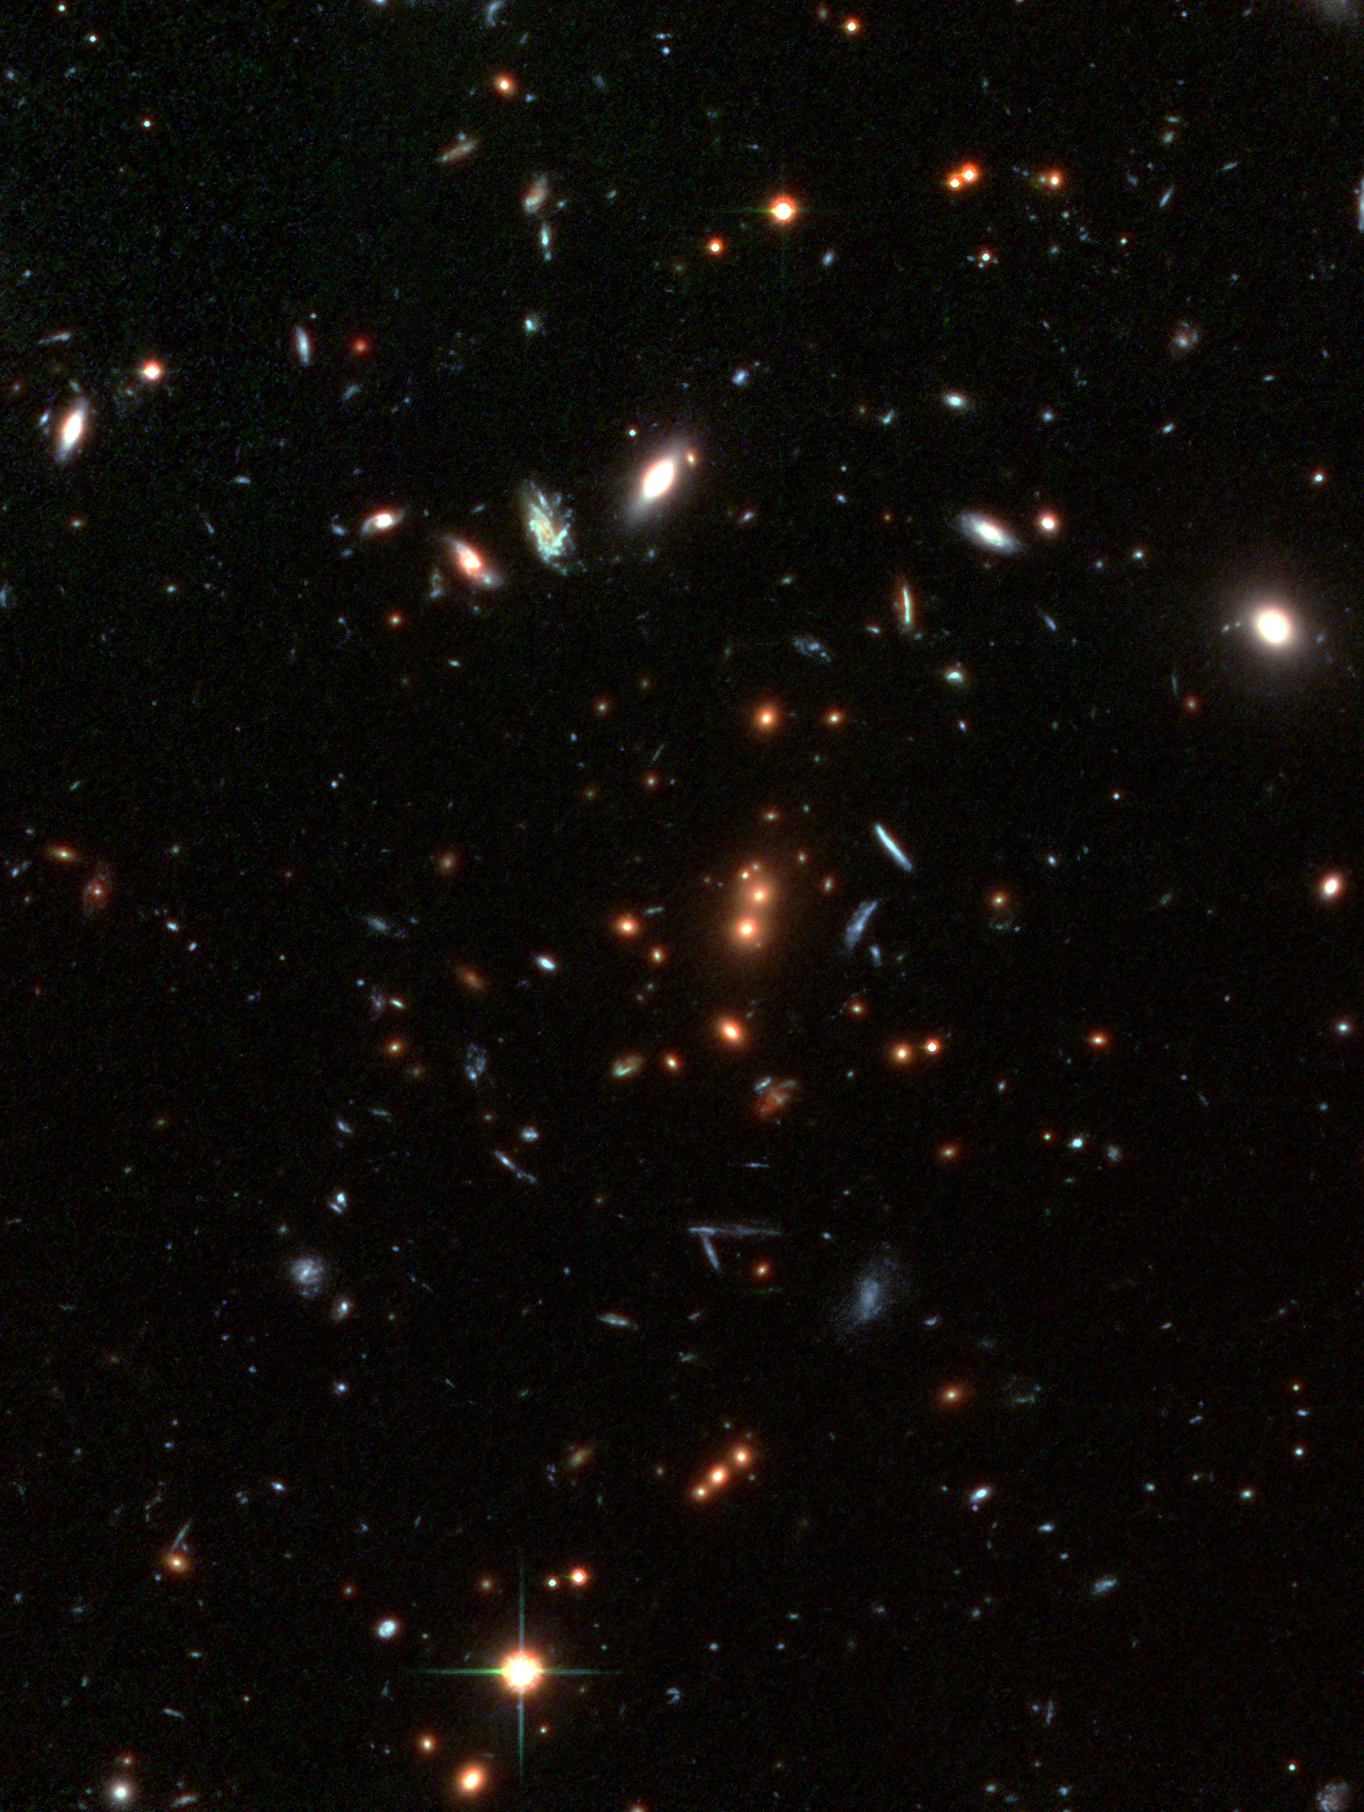

The cluster RDCS1252.9-2927 (detail)

Looking back in time to when the universe was in its formative youth, the Advanced Camera for Surveys (ACS) aboard the NASA/ESA Hubble Space Telescope captured this revealing image of the galaxy cluster RDCS1252.9-2927.

This image is made with an additional infrared exposure taken with the European Southern Observatory's Very Large Telescope, shows mature galaxies in a massive cluster that existed when the cosmos was 5 billion years old. The cluster, called RDCS1252.9-2927, is as massive as 200 trillion suns and is the most massive known cluster for its epoch. The image reveals the core of the cluster and is part of a much larger mosaic of the entire cluster. Dominating the core are a pair of large, reddish elliptical galaxies [near centre of image]. Their red colour indicates an older population of stars. Most of the stars are at least 1 billion years old. The two galaxies appear to be interacting and may eventually merge to form a larger galaxy that is comparable to the brightest galaxies seen in present-day clusters.

The red galaxies surrounding the central pair are also cluster members. The cluster probably contains many thousands of galaxies, but only about 50 can be seen in this image. The full mosaic reveals several hundred cluster members. Many of the other galaxies in the image, including several of the blue galaxies, are foreground or background galaxies. The colour-composite image was assembled from two observations (through i and z filters) taken between May and June 2002 by the ACS Wide Field Camera, and one image with the ISAAC instrument on the VLT taken in 2002 (combined from a J filter exposure and a K filter exposure).

Credit: NASA, ESA, J. Blakeslee (Johns Hopkins University), M. Postman ( Space Telescope Science Institute) and P. Rosati, Chris Lidman & Ricardo Demarco (European Southern Observatory)